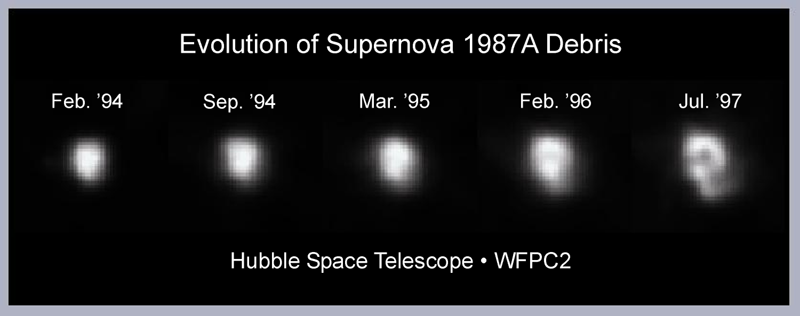

Evolution of debris in supernova 1987A

This NASA Hubble Space Telescope Wide Field and Planetary Camera 2 sequence of images shows the debris (the visible part of the shredded star) of supernova 1987A. The first photo was taken in 1994 and the last in 1997, before and after a collision (not visible in the image) between an outward moving blast wave and the innermost parts of the circumstellar ring. The shredded star pictured is heated by radioactive elements created in the supernova explosion.

Credit: George Sonneborn and Jason Pun (NASA/ESA/Goddard Space Flight Center)